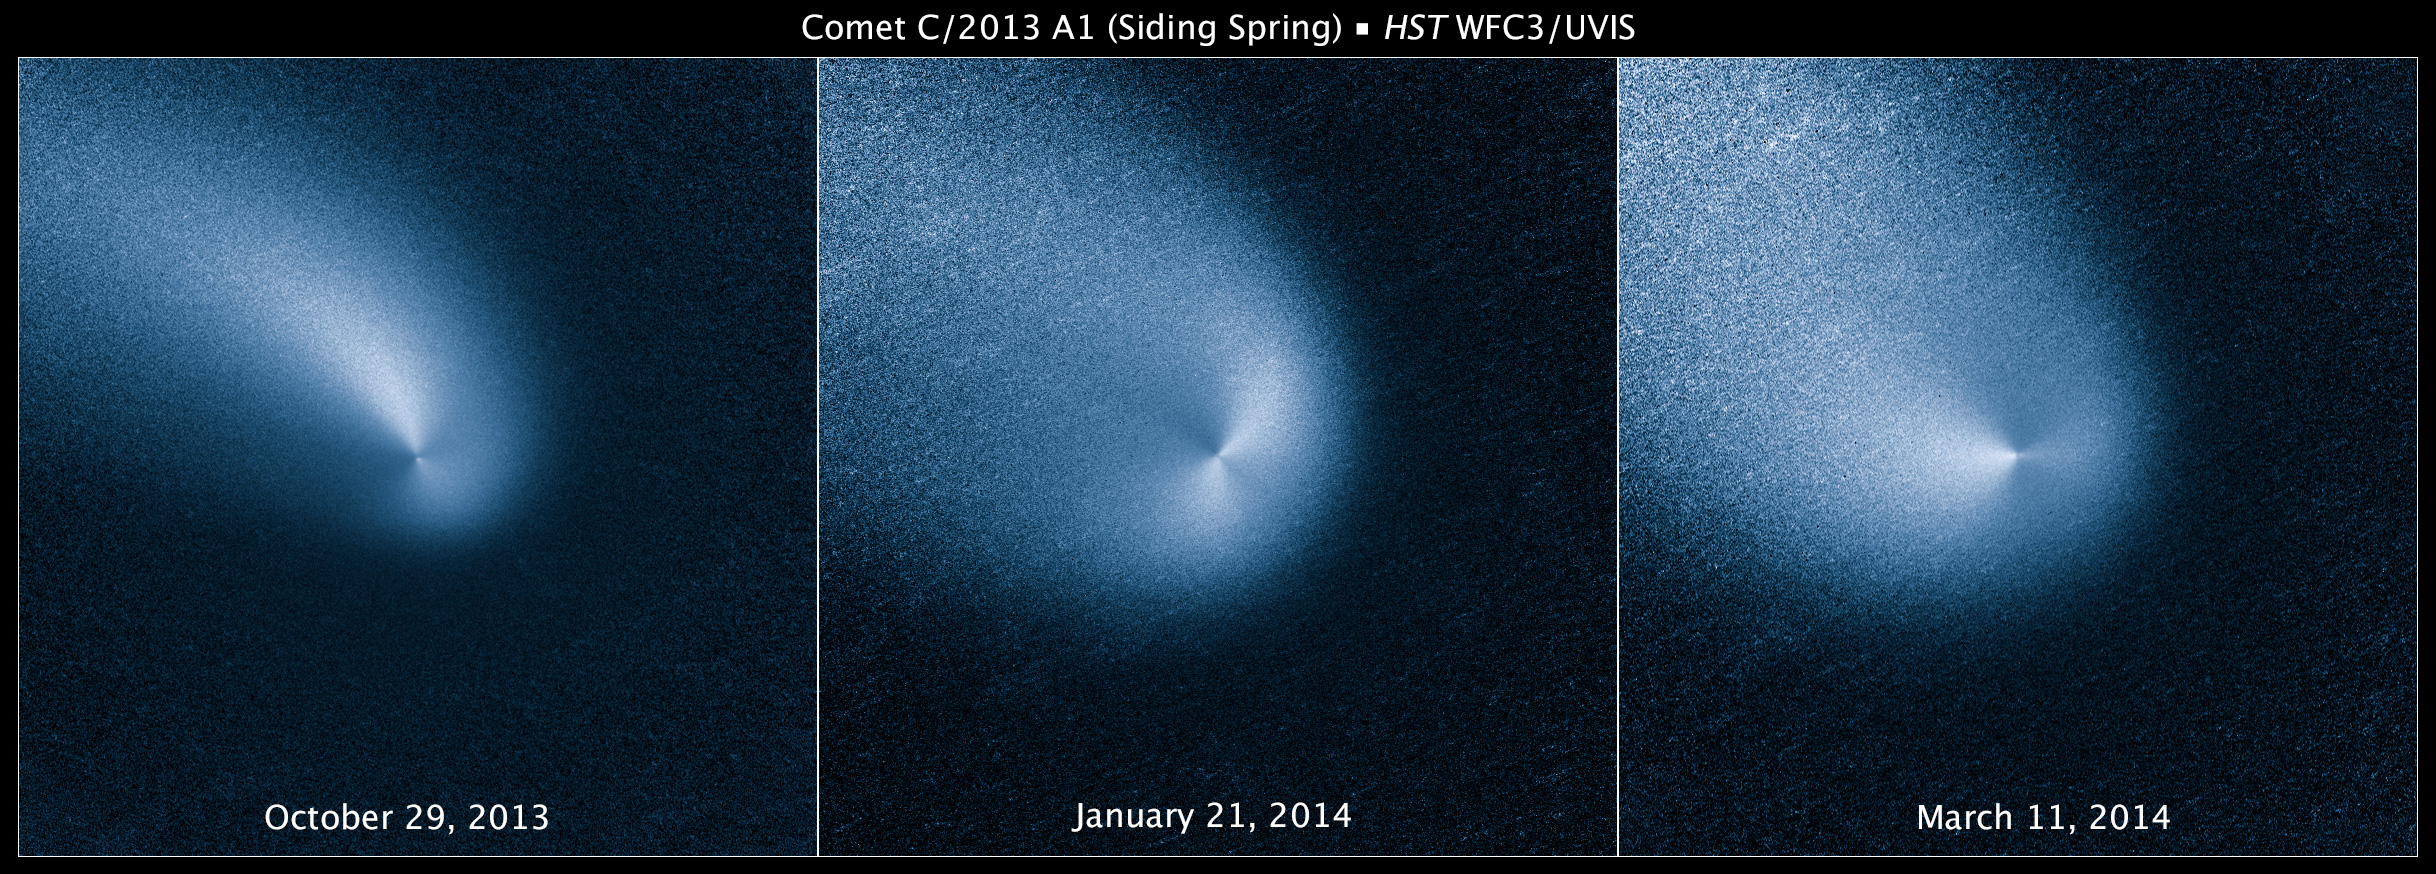

Comet Siding Spring over time

These three images of Comet Siding Spring were taken by the NASA/ESA Hubble Space Telescope at three month intervals.

Comet Siding Spring is plunging toward the Sun along a roughly 1-million-year orbit. The comet, discovered in 2013, was within the radius of Jupiter's orbit when the Hubble Space Telescope photographed it on March 11, 2014.

Hubble resolves two jets of dust coming from the solid icy nucleus. These persistent jets were first seen in Hubble pictures taken on Oct. 29, 2013. The feature should allow astronomers to measure the direction of the nucleus's pole, and hence, rotation axis.

The comet will make its closest approach to our Sun on Oct. 25, 2014, at a distance of 130 million miles, well outside Earth's orbit. On its inbound leg, Comet Siding Spring will pass within 84,000 miles of Mars on Oct. 19, 2014, which is less than half the Moon's distance from Earth. The comet is not expected to become bright enough to be seen with the naked eye.

Credit: NASA, ESA, and J.-Y. Li (Planetary Science Institute)